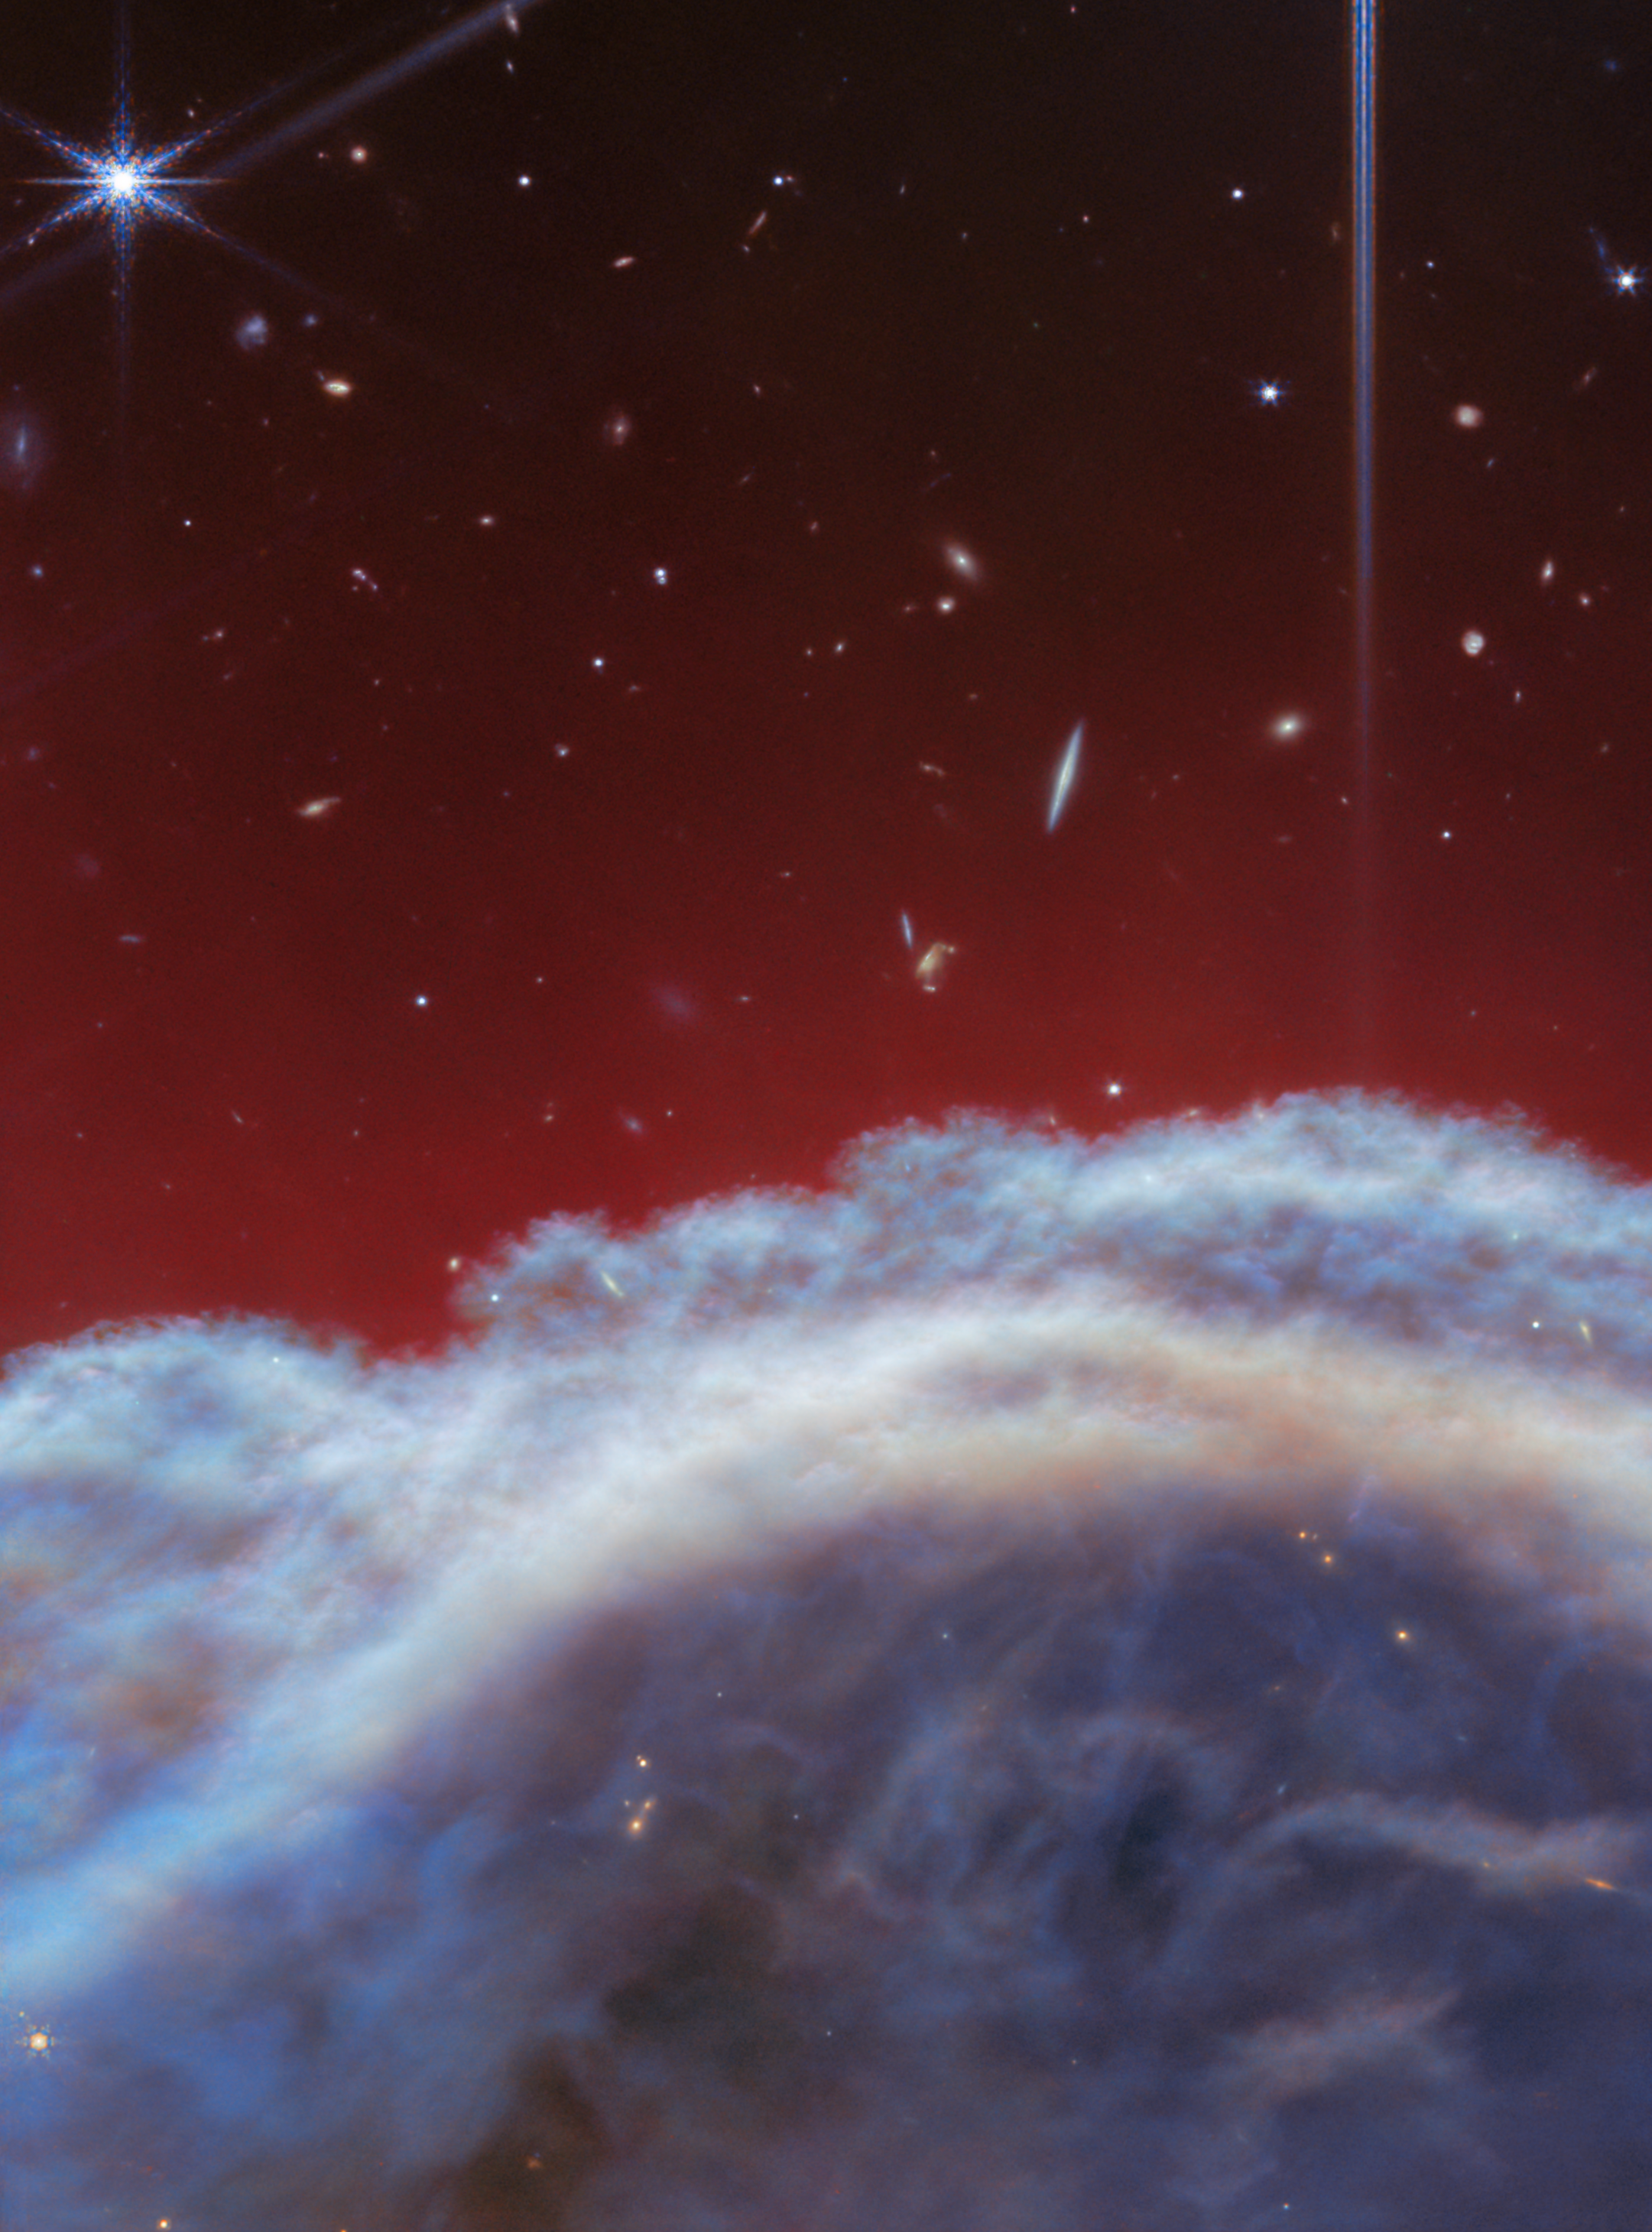

Horsehead Nebula (NIRCam image)

The NASA/ESA/CSA James Webb Space Telescope has captured the sharpest infrared images to date of one of the most distinctive objects in our skies, the Horsehead Nebula. These observations show a part of the iconic nebula in a whole new light, capturing its complexity with unprecedented spatial resolution.

Webb’s new images show part of the sky in the constellation Orion (The Hunter), in the western side of the Orion B molecular cloud. Rising from turbulent waves of dust and gas is the Horsehead Nebula, otherwise known as Barnard 33, which resides roughly 1300 light-years away.

The nebula formed from a collapsing interstellar cloud of material, and glows because it is illuminated by a nearby hot star. The gas clouds surrounding the Horsehead have already dissipated, but the jutting pillar is made of thick clumps of material that is harder to erode. Astronomers estimate that the Horsehead has about five million years left before it too disintegrates. Webb’s new view focuses on the illuminated edge of the top of the nebula’s distinctive dust and gas structure.

The Horsehead Nebula is a well-known photon-dominated region, or PDR. In such a region ultraviolet light from young, massive stars creates a mostly neutral, warm area of gas and dust between the fully ionised gas surrounding the massive stars and the clouds in which they are born. This ultraviolet radiation strongly influences the gas chemistry of these regions and acts as the most important source of heat.

These regions occur where interstellar gas is dense enough to remain neutral, but not dense enough to prevent the penetration of far-ultraviolet light from massive stars. The light emitted from such PDRs provides a unique tool to study the physical and chemical processes that drive the evolution of interstellar matter in our galaxy, and throughout the Universe from the early era of vigorous star formation to the present day.

Owing to its proximity and its nearly edge-on geometry, the Horsehead Nebula is an ideal target for astronomers to study the physical structures of PDRs and the evolution of the chemical characteristics of the gas and dust within their respective environments, and the transition regions between them. It is considered one of the best objects in the sky to study how radiation interacts with interstellar matter.

This image was captured with Webb’s NIRCam (Near-InfraRed Camera) instrument.

Credit: ESA/Webb, NASA, CSA, K. Misselt (University of Arizona) and A. Abergel (IAS/University Paris-Saclay, CNRS)